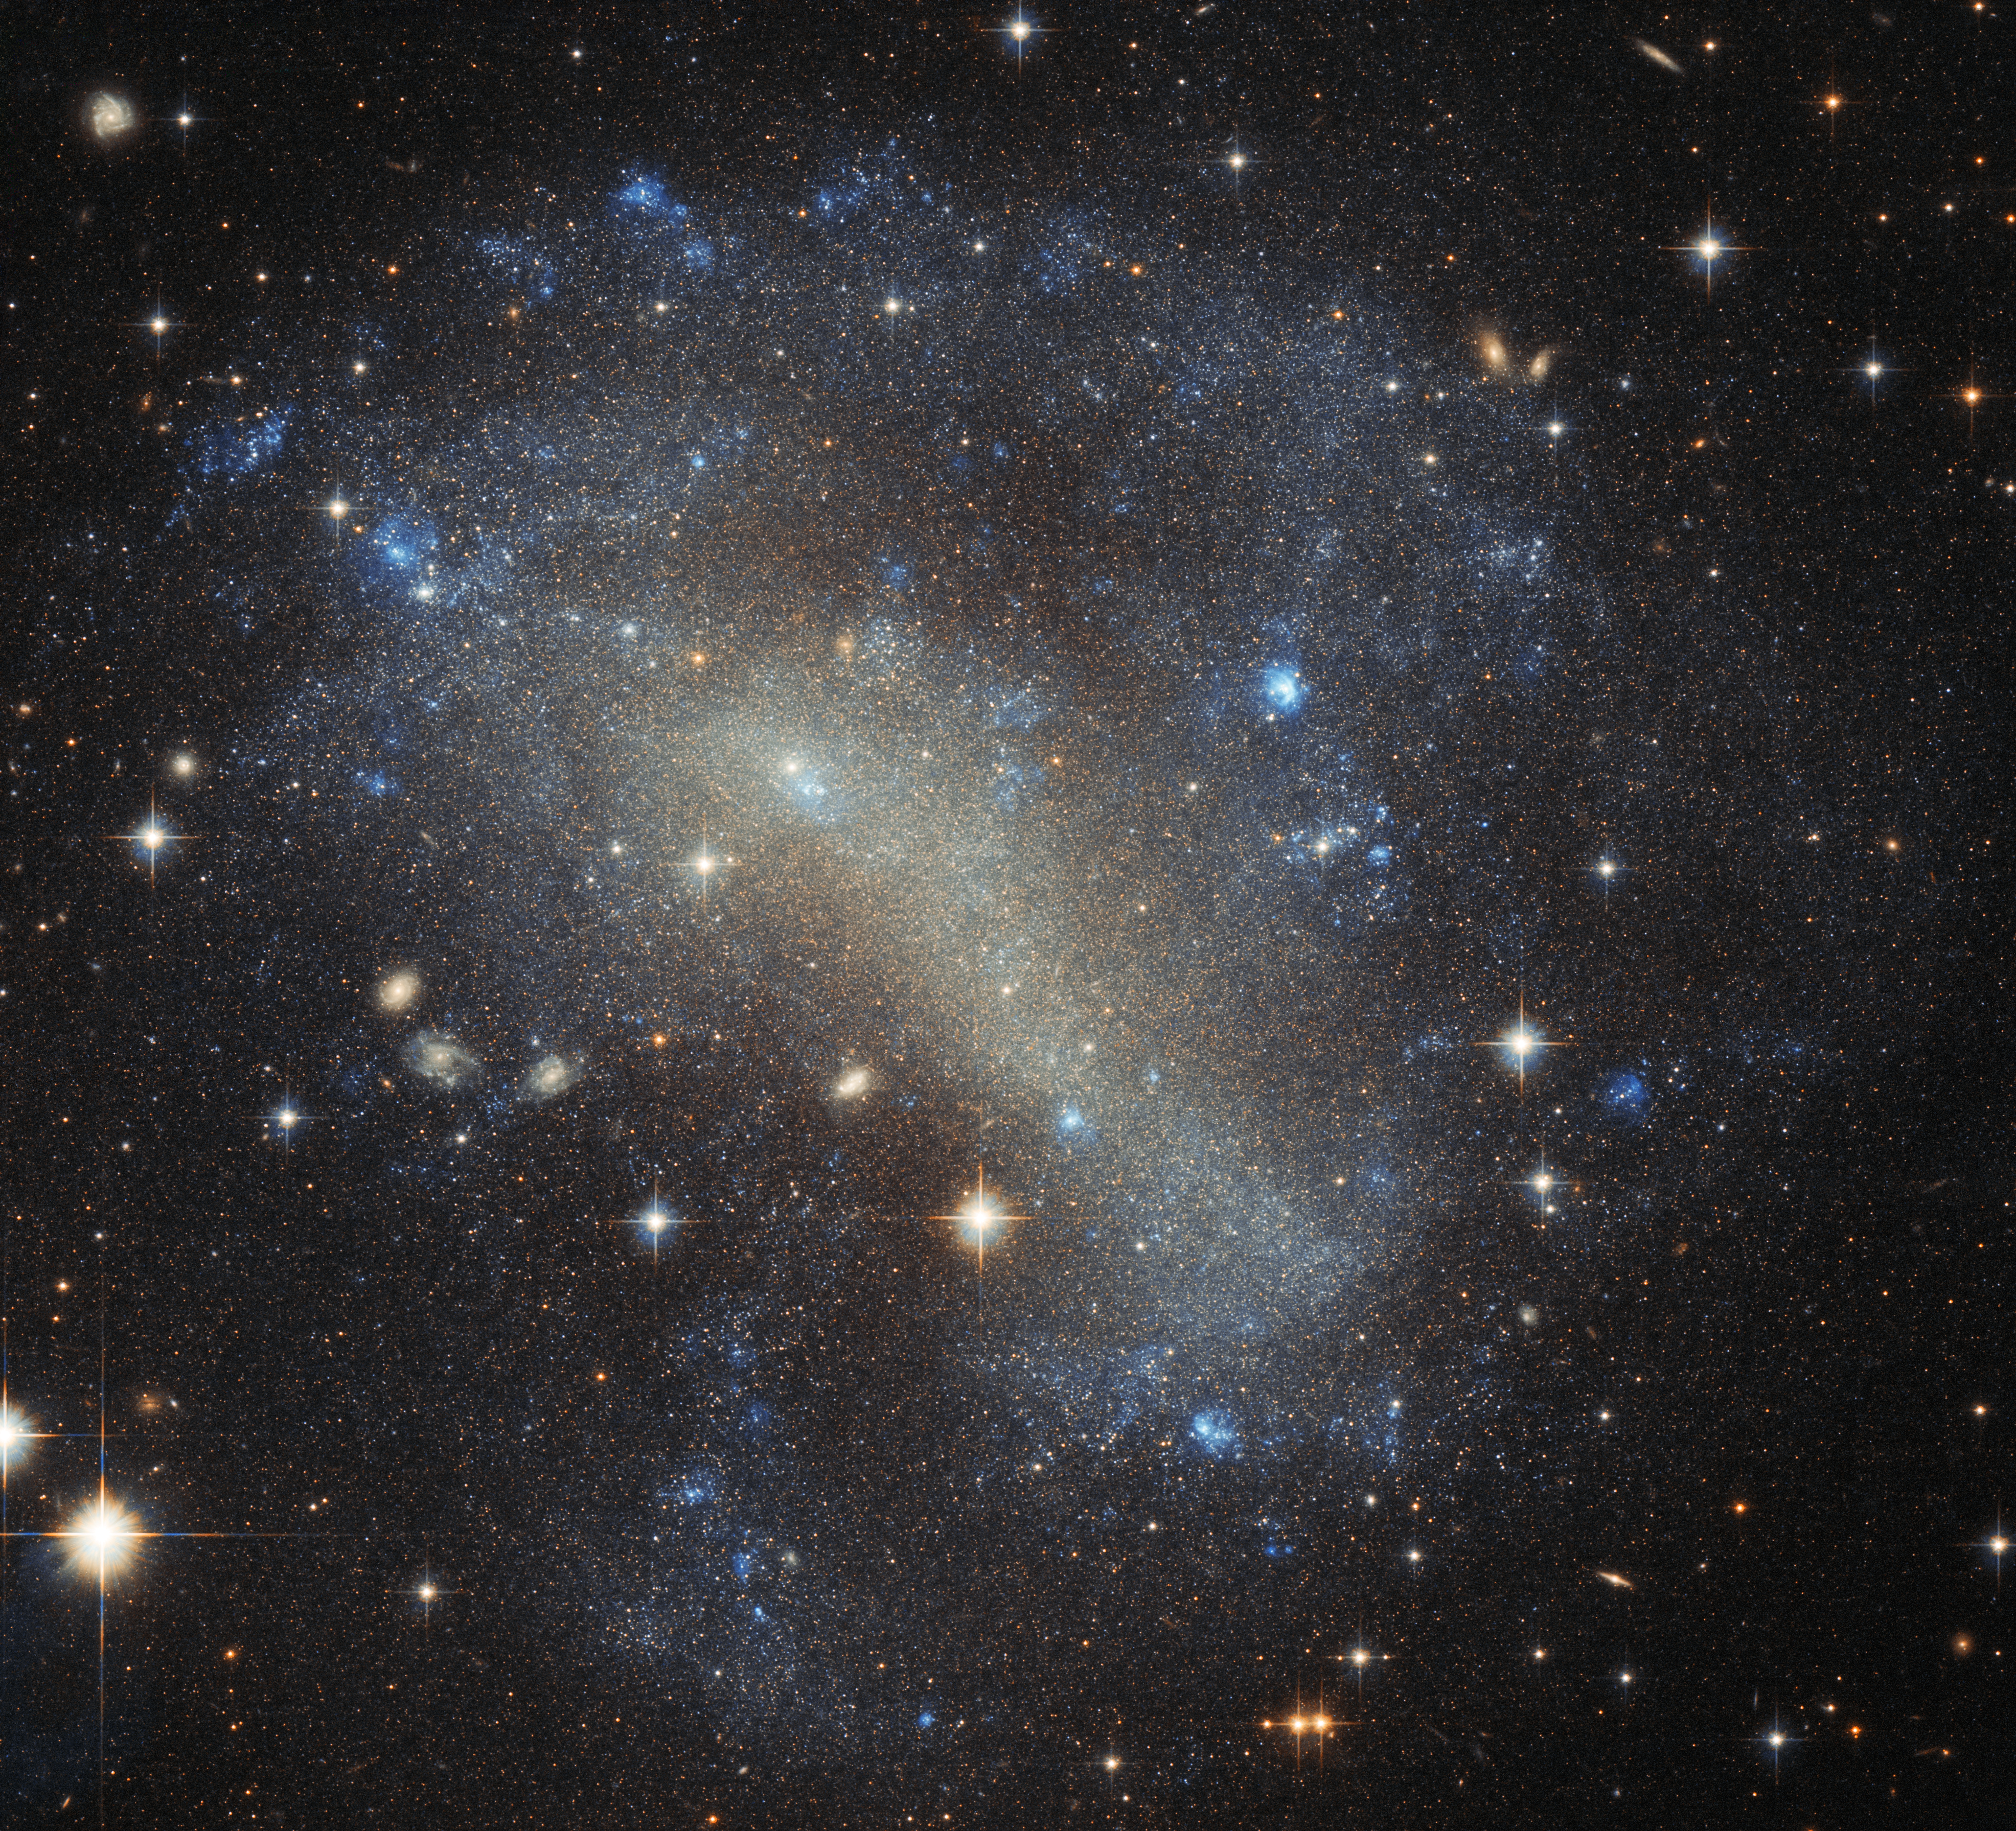

A frenzy of stars

Discovered in 1900 by astronomer DeLisle Stewart and here imaged by the NASA/ESA Hubble Space Telescope, IC 4710 is an undeniably spectacular sight. The galaxy is a busy cloud of bright stars, with bright pockets — marking bursts of new star formation — scattered around its edges.

IC 4710 is a dwarf irregular galaxy. As the name suggests, such galaxies are irregular and chaotic in appearance, lacking central bulges and spiral arms — they are distinctly different from spirals or ellipticals. It is thought that irregular galaxies may once have been spirals or ellipticals, but became distorted over time through external gravitational forces during interactions or mergers with other galaxies. Dwarf irregulars in particular are important to our overall understanding of galactic evolution, as they are thought to be similar to the first galaxies that formed in the Universe.

IC 4710 lies roughly 25 million light-years away in the southern constellation of Pavo (The Peacock). This constellation is located in the southern skies and also contains the third-brightest globular cluster in the sky, NGC 6752, the spiral galaxy NGC 6744, and six known planetary systems (including HD 181433 which is host to a super-Earth).

The data used to create this image were gathered by Hubble’s Advanced Camera for Surveys (ACS).

Credit: ESA/Hubble & NASA Acknowledgements: Judy Schmidt